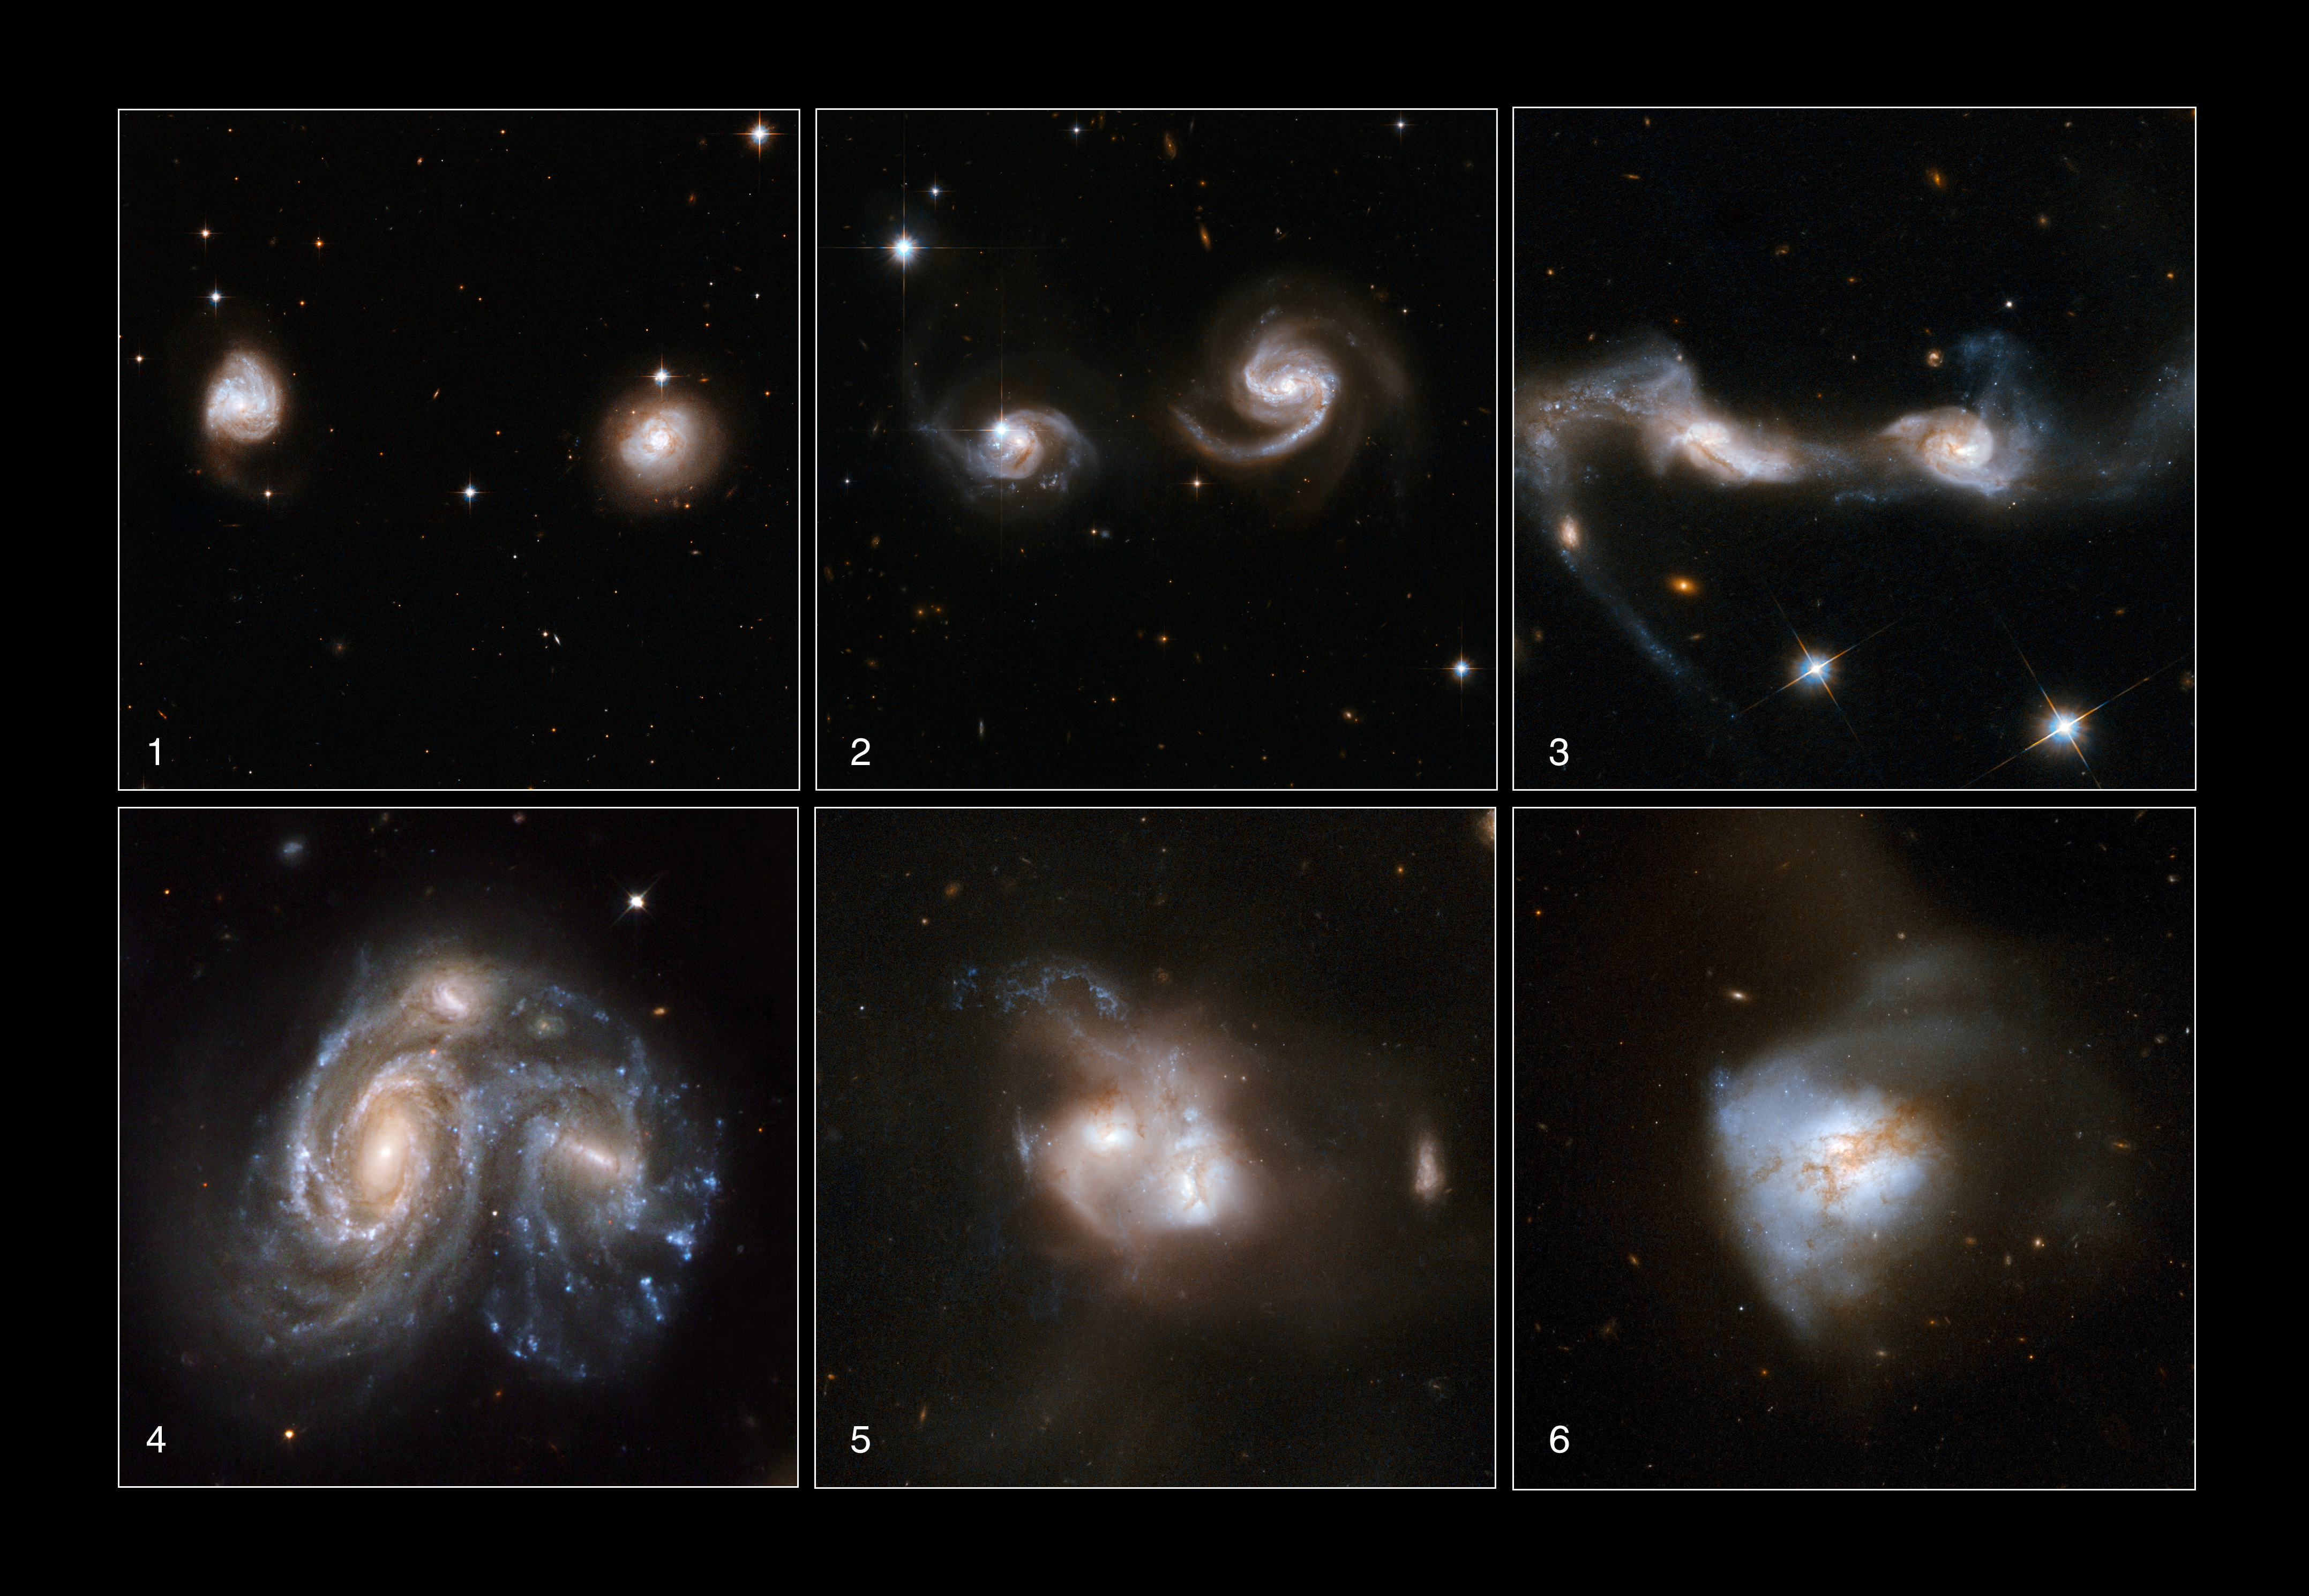

Galaxies Gone Wild!

These images show 6 different snapshots of galaxies at different stages of merging. It takes hundreds of millions of years for one merger to complete, so the individual stages are illustrated with different images from the fifty nine new images of colliding galaxies that make up the largest collection of Hubble images ever released together. As this astonishing Hubble atlas of interacting galaxies illustrates, galaxy collisions produce a remarkable variety of intricate structures.

1. Typically the first sign of an interaction will be a bridge of matter as the first gentle tugs of gravity tease out dust and gas from the approaching galaxies.

2. As the outer reaches of the galaxies begin to intermingle, long streamers of gas and dust, known as tidal tails, stretch out and sweep back to wrap around the cores.

3. These long, often spectacular, tidal tails are the signature of an interaction and can persist long after the main action is over.

4. As the galaxy cores approach each other their gas and dust clouds are buffeted and accelerated dramatically by the conflicting pull of matter from all directions. These forces can result in shockwaves rippling through the interstellar clouds.

5. Gas and dust are siphoned into the active central regions, fuelling bursts of star formation that appear as characteristic blue knots of young stars. As the clouds of dust build they are heated so that they radiate strongly, becoming some of the brightest infrared objects in the sky.

6. Some of the galaxies show striking, highly distorted features, with dust lanes crossing between the galaxies and long filaments of stars and gas extending far beyond the central regions. Beautifully interwoven galaxies are the twisted outcomes of these gargantuan encounters. These colossal and violent interactions between the galaxies, trigger star formation from the large clouds of gas in dazzling, dramatic bursts, creating brilliant blue star clusters.

Most of the 59 new Hubble images are part of a large investigation of luminous and ultraluminous infrared galaxies called the GOALS project (Great Observatories All-sky LIRG Survey). This survey combines observations from Hubble, the NASA Spitzer Space Observatory, the NASA Chandra X-Ray Observatory and NASA Galaxy Explorer. The Hubble observations are led by Professor Aaron S. Evans from the University of Virginia and the National Radio Astronomy Observatory (USA).

Credit: NASA, ESA, the Hubble Heritage Team (STScI/AURA)-ESA/Hubble Collaboration and A. Evans (University of Virginia, Charlottesville/NRAO/Stony Brook University), K. Noll (STScI), and J. Westphal (Caltech)